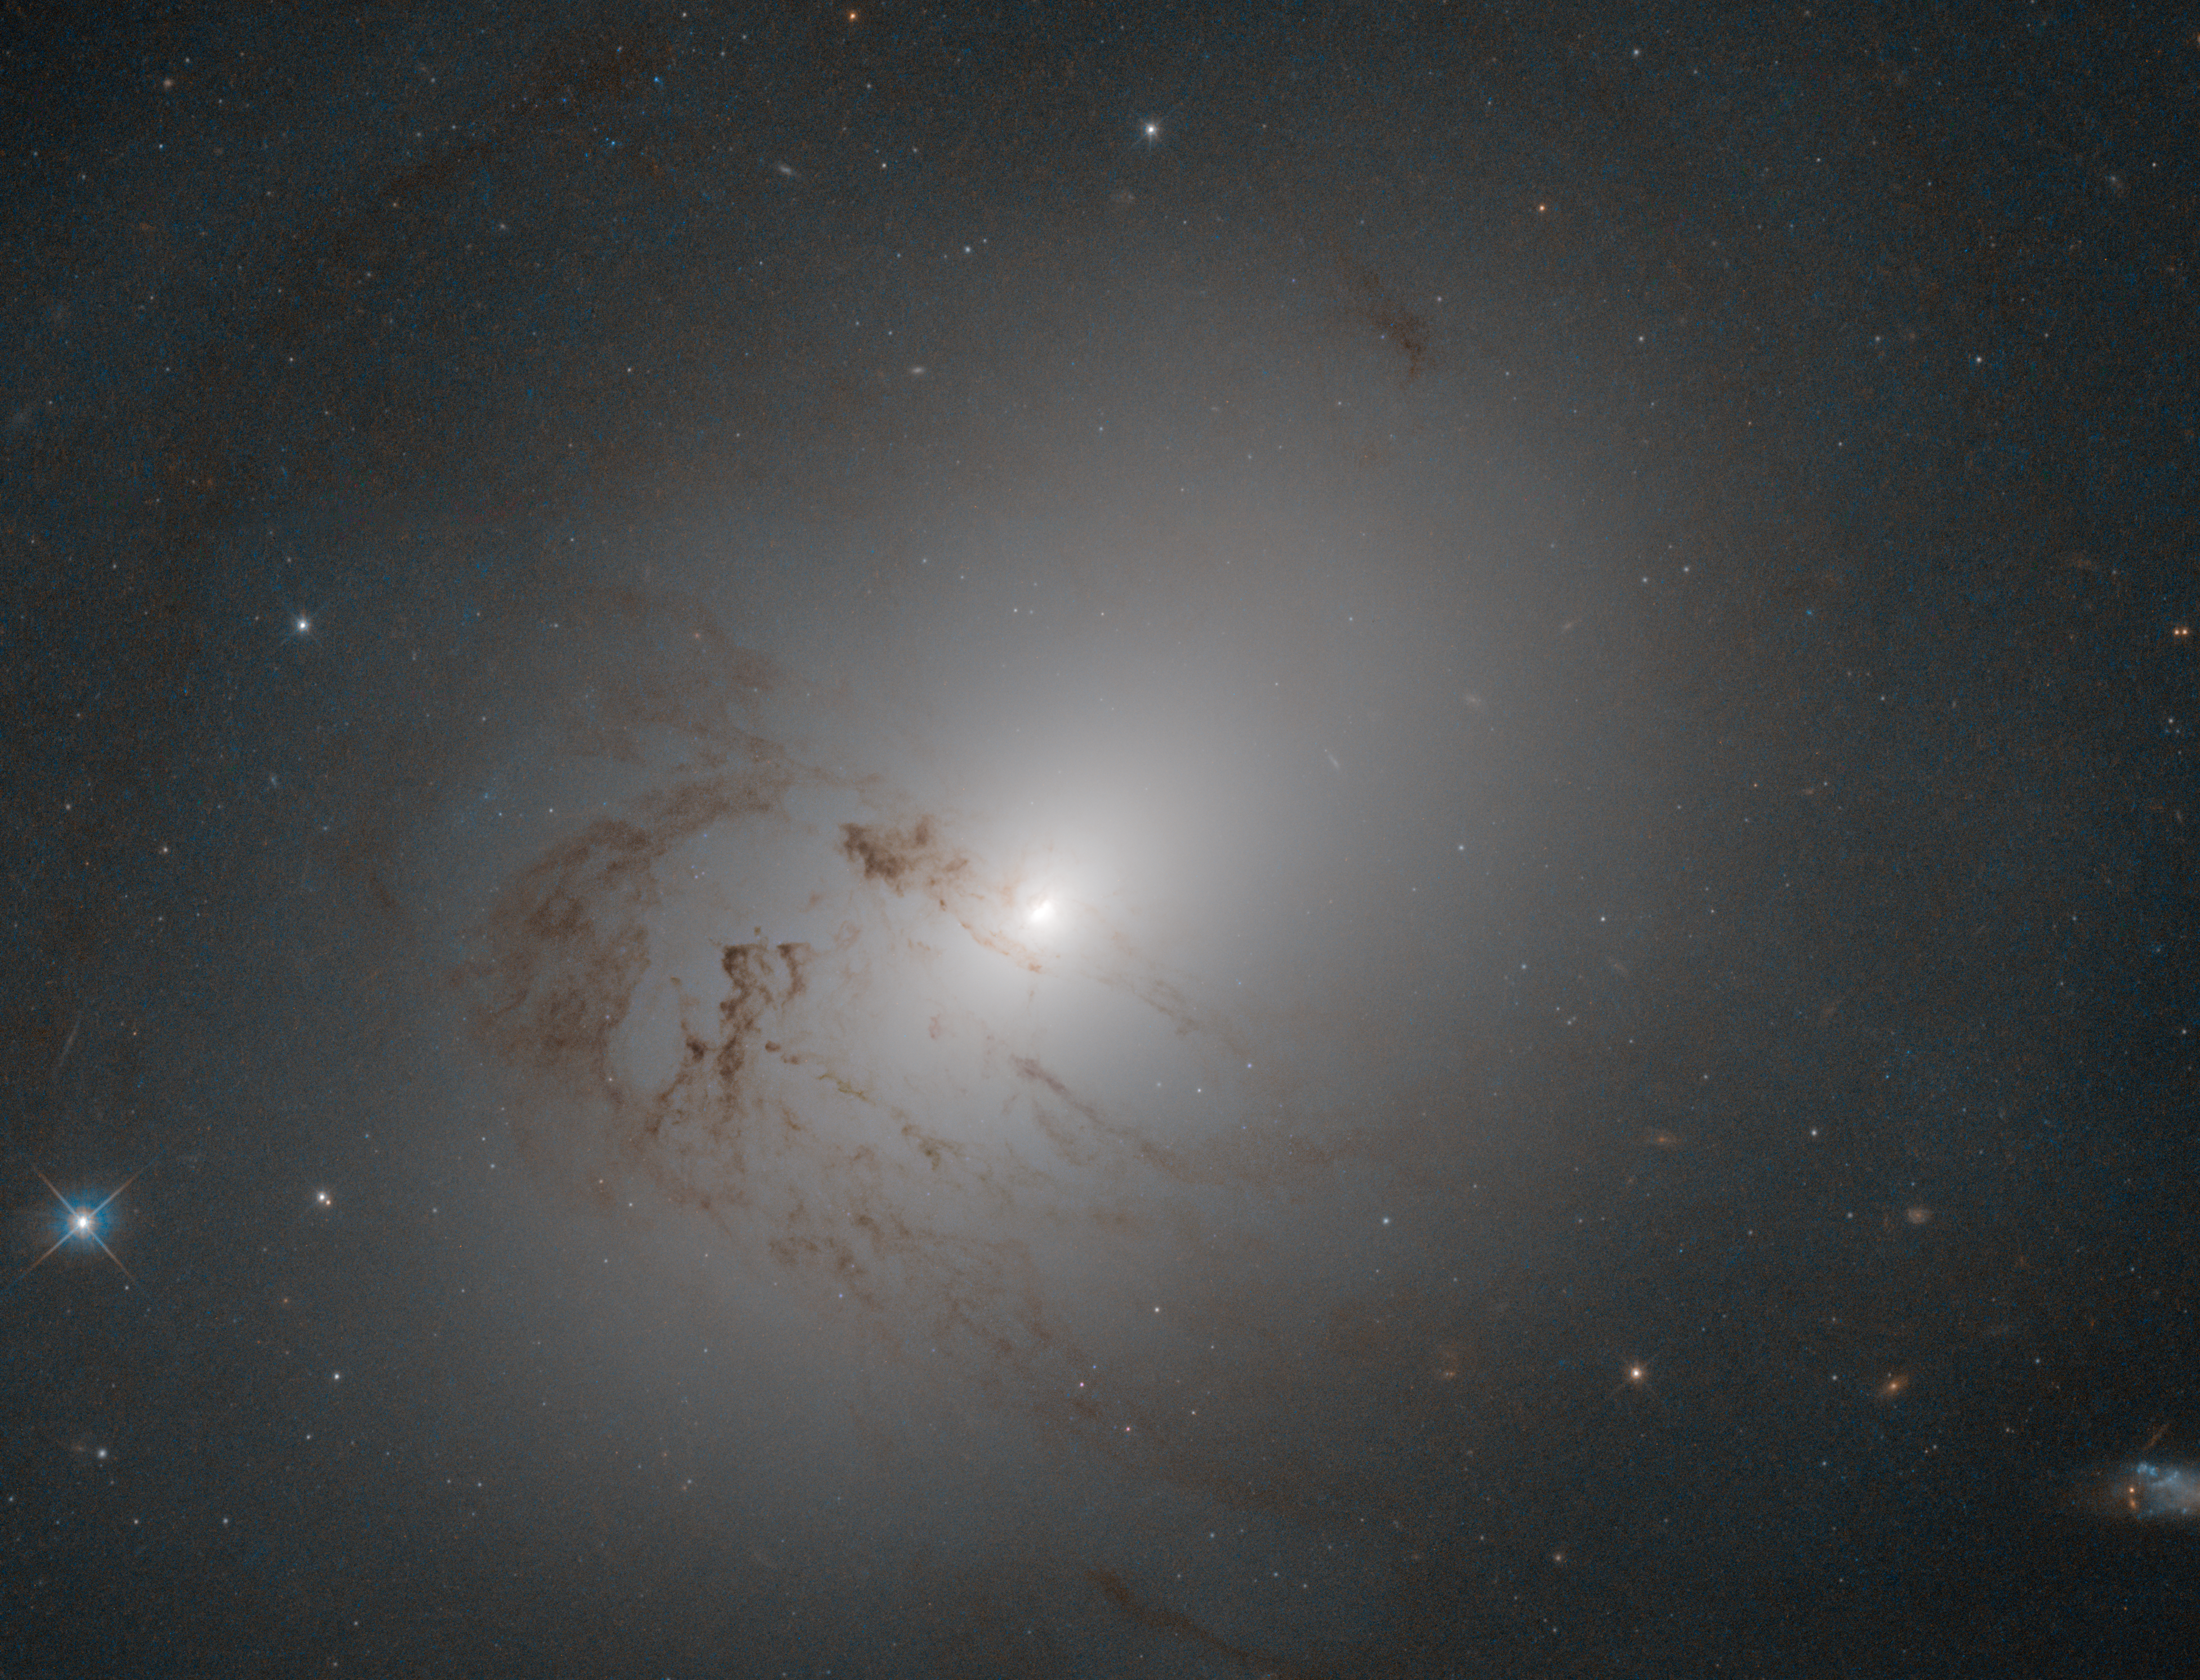

Stuck in the middle

This pretty, cloud-like object may not look much like a galaxy — it lacks the well-defined arms of a spiral galaxy, or the reddish bulge of an elliptical — but it is in fact something known as a lenticular galaxy. Lenticular galaxies sit somewhere between the spiral and elliptical types; they are disc-shaped, like spirals, but they no longer form large numbers of new stars and thus contain only ageing populations of stars, like ellipticals.

NGC 2655’s core is extremely luminous, resulting in its additional classification as a Seyfert galaxy: a type of active galaxy with strong and characteristic emission lines. This luminosity is thought to be produced as matter is dragged onto the accretion disc of a supermassive black hole sitting at the centre of NGC 2655. The structure of NGC 2655’s outer disc, on the other hand, appears calmer, but it is oddly-shaped. The complex dynamics of the gas in the galaxy suggest that it may have had a turbulent past, including mergers and interactions with other galaxies.

NGC 2655 is located about 80 million light-years from Earth in the constellation of Camelopardalis (The Giraffe). Camelopardalis contains many other interesting deep-sky objects, including the open cluster NGC 1502, the elegant Kemble’s Cascade asterism, and the starburst galaxy NGC 2146.

Credit: ESA/Hubble & NASA, A. Fillipenko